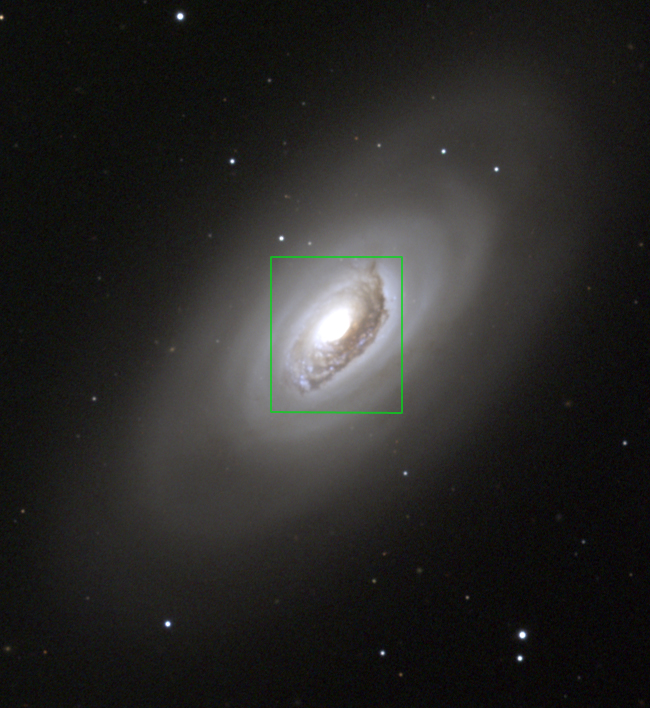

HST image overlay on ground-based image

This picture of M64 is a colour composite of CCD images from the 0.9-meter telescope of the Kitt Peak National Observatory, near Tucson, Arizona, taken in January 1997. The image has been rotated and an overlay of the HST image outline has been superposed.

Credit: NOAO/AURA/NSF and N.A. Sharp (NOAO)